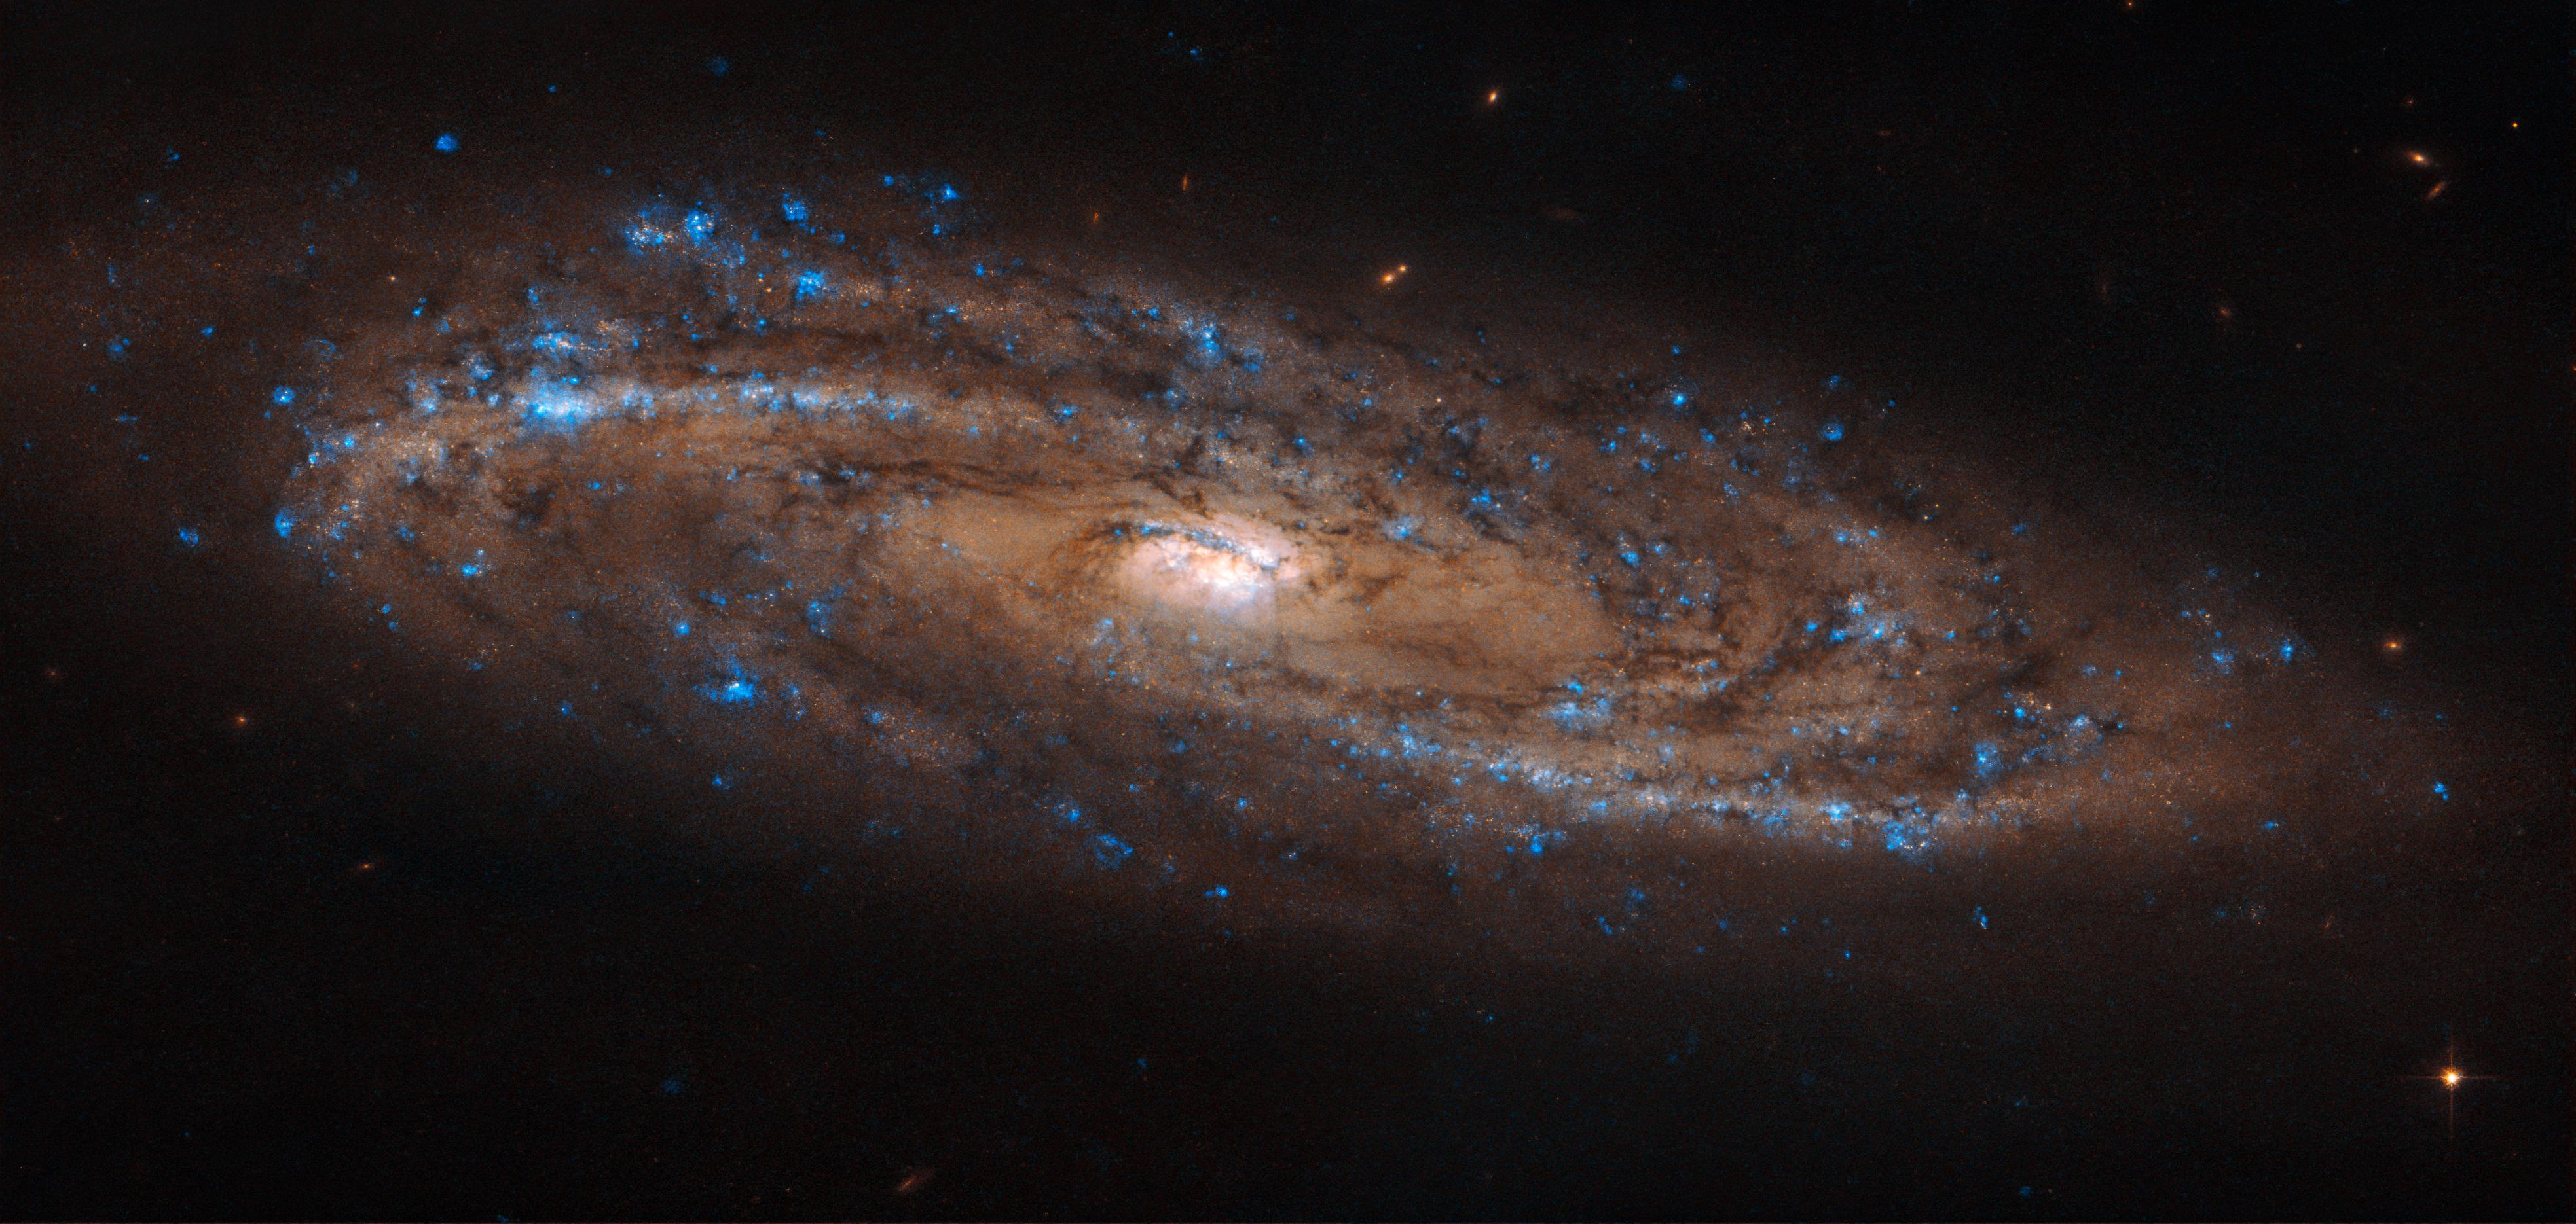

A Stretched Spiral

This sparkling spiral galaxy looks almost stretched across the sky in this new image from the NASA/ESA Hubble Space Telescope. Known as NGC 4100, the galaxy boasts a neat spiral structure and swirling arms speckled with the bright blue hue of newly formed stars.

Like so many of the stunning images of galaxies we enjoy today, this image was captured by Hubble’s Advanced Camera for Surveys (ACS). This remarkable instrument was installed in 2002, and, with some servicing over the years by intrepid astronauts, is still going strong. You can access many of the stunning images captured by the ACS here, featuring objects from out-of-this-world spiral galaxies to dark, imposing nebulae, bizarre cosmic phenomena, and sparkling clusters made up of thousands upon thousands of stars.

Credit: ESA/Hubble & NASA, L. Ho